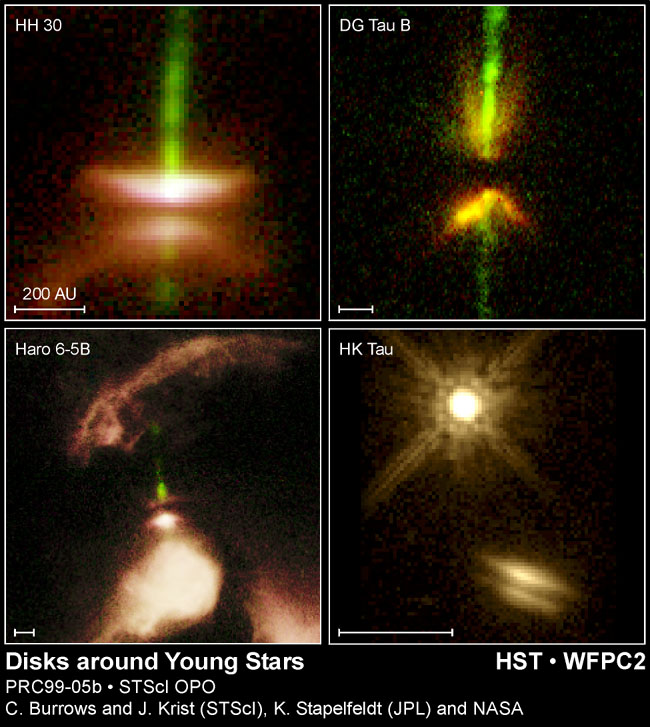

Disks around young stars

Dramatic pictures of eerie disks of dust encircling young stars are giving astronomers a new look at what may be the early formative stages of planetary systems.

Credit: Karl Stappelfeldt (JPL) and colleagues, John Krist (ST ScI), the WFPC2Science Team, Chris Burrows (ST ScI), and NASA/ESA